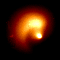

Comet Hale-Bopp

In this close-up picture, the stars have been subtracted through image processing.

Credit: H.A. Weaver (Applied Research Corp.), P.D. Feldman (The Johns Hopkins University), and NASA/ESA